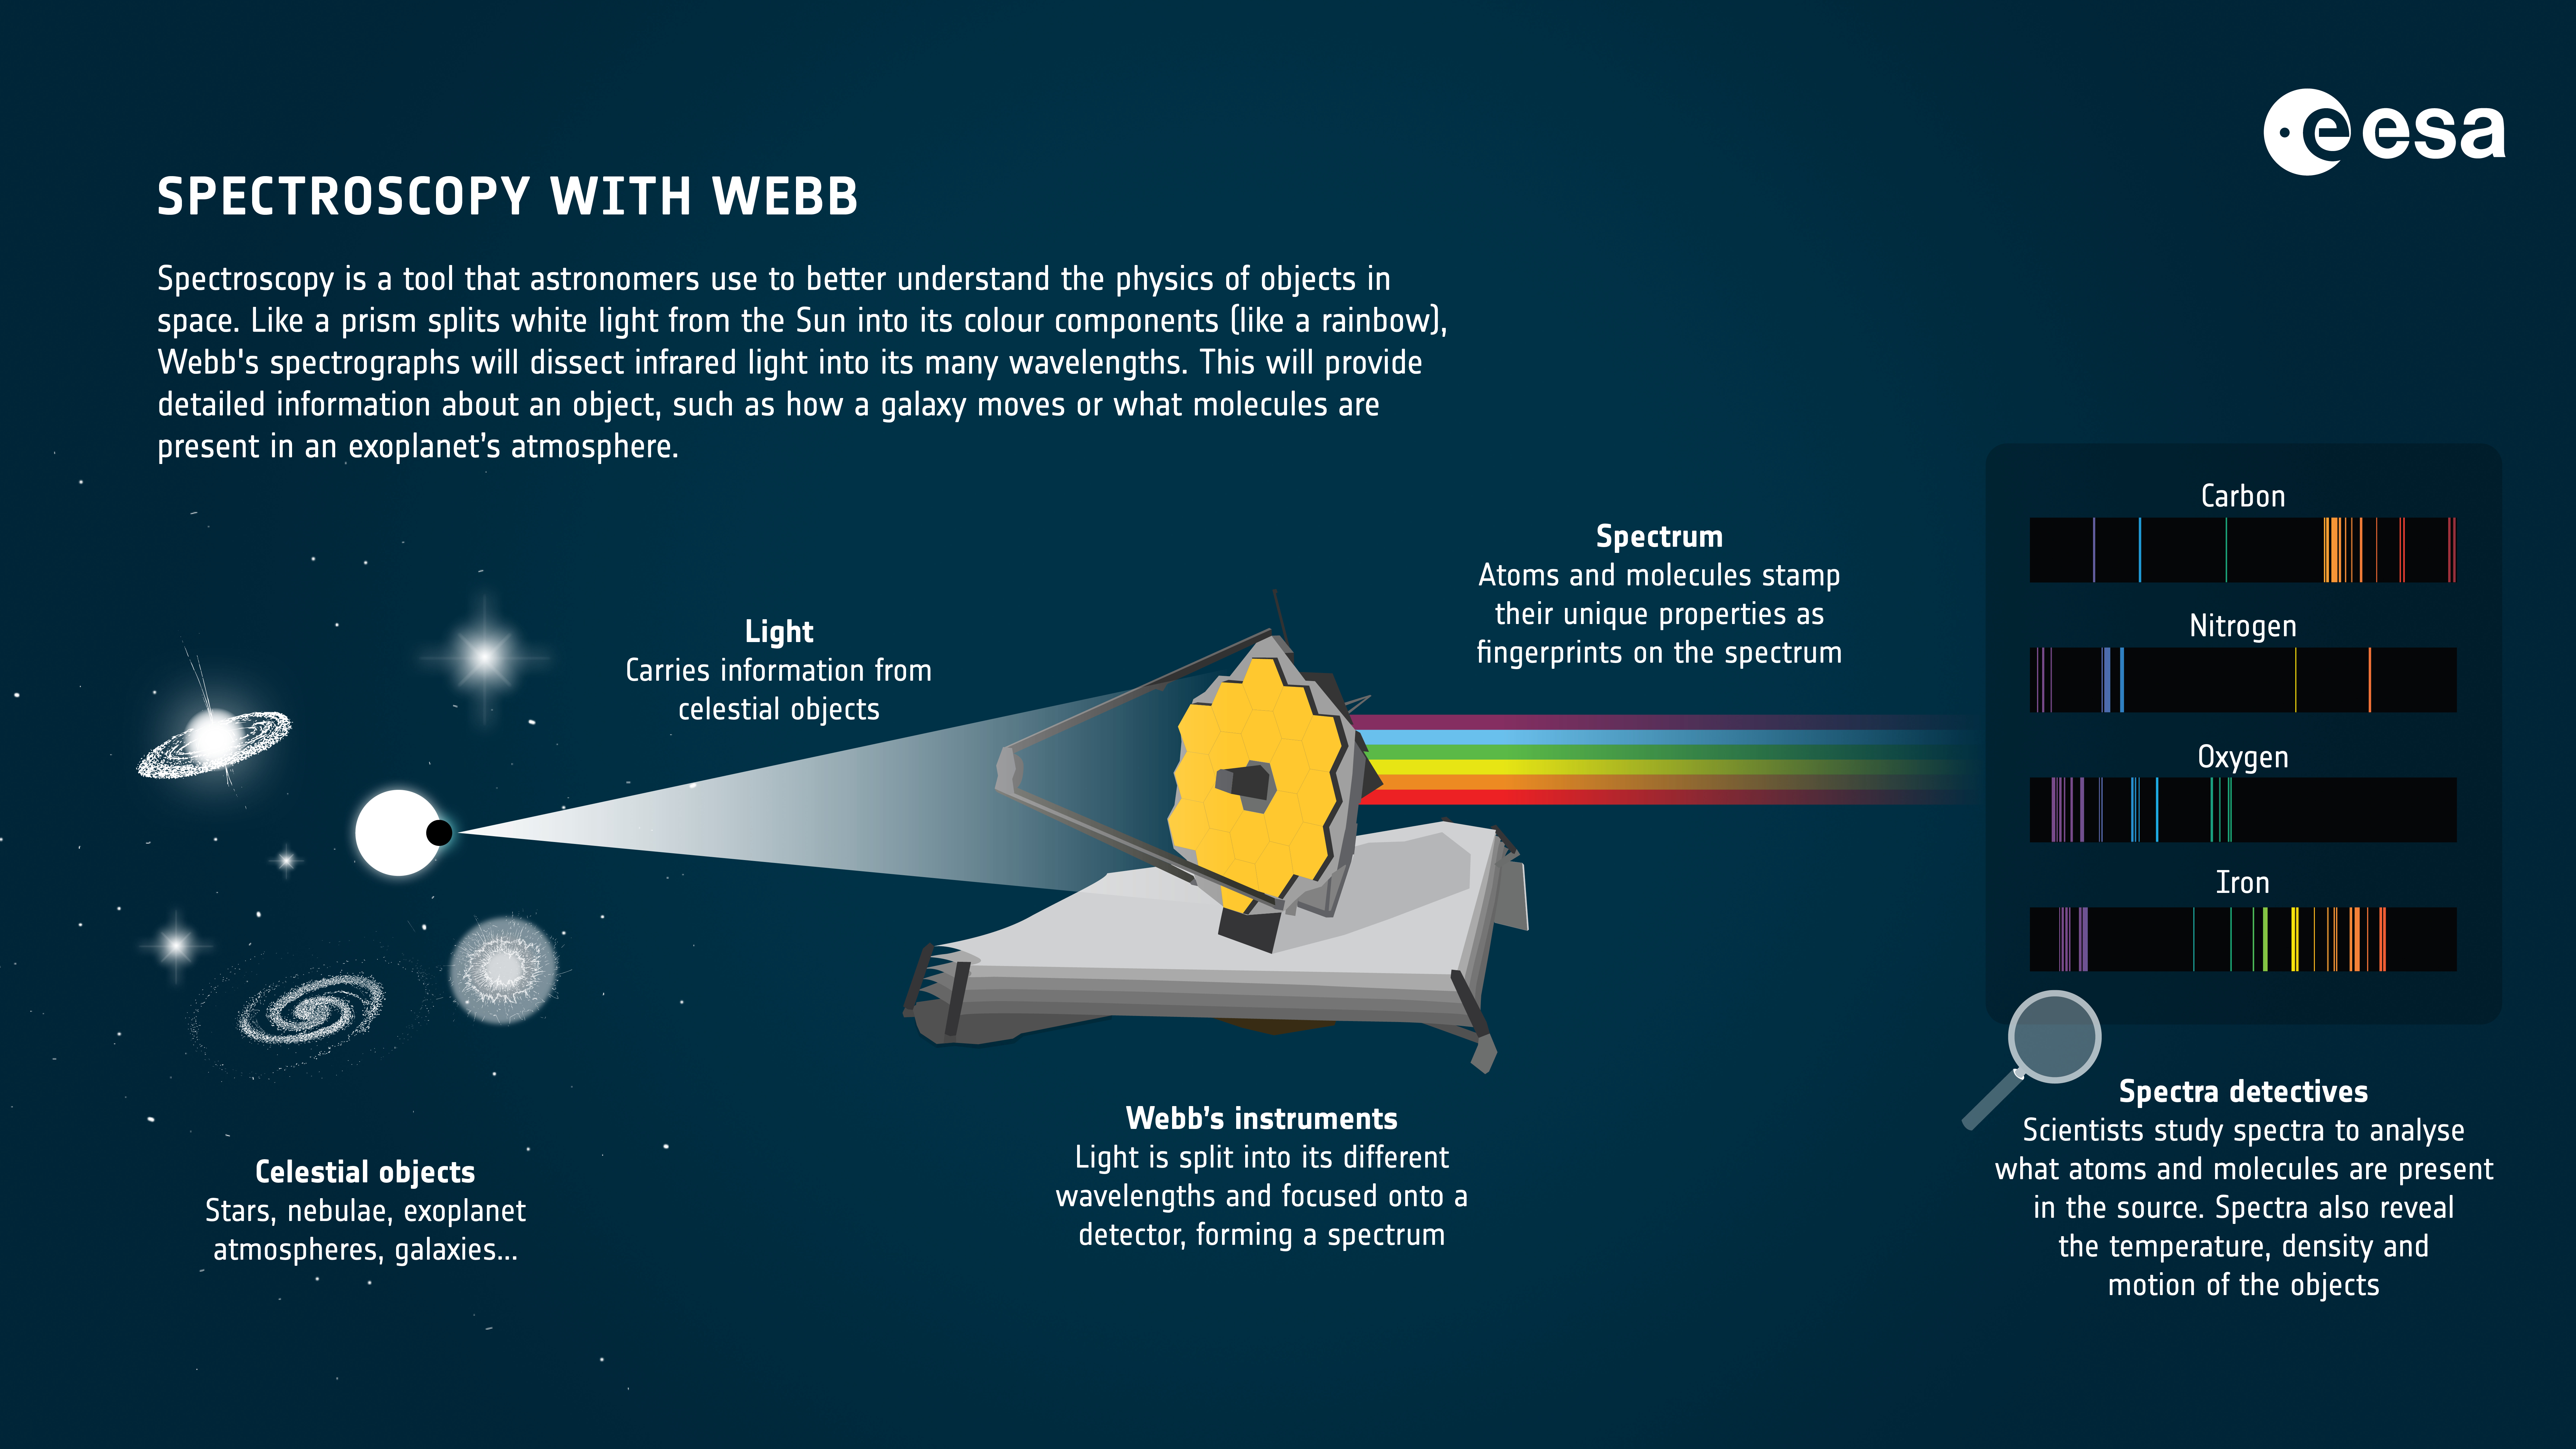

Spectroscopy with Webb

The spectrographs on board the NASA/ESA/CSA James Webb Space Telescope provide scientists with the data needed to analyse the materials that make up stars, nebulae, galaxies and the atmospheres of planets.

Light that enters the telescope is split into its different wavelengths by a grating or a prism, forming a spectrum. This spectrum is then focused onto a detector. Light from each chemical element has a unique spectrum, like a fingerprint. The spectrum’s pattern is analysed by astronomers to decipher which atoms and molecules are present in the source of light, and understand the physical and chemical characteristics of the source.

Instruments like NIRSpec and MIRI make spectroscopic observations of extended and complex targets (such as galaxies, nebulae, or crowded fields of stars or galaxies) in one single shot.

Credit: ESA